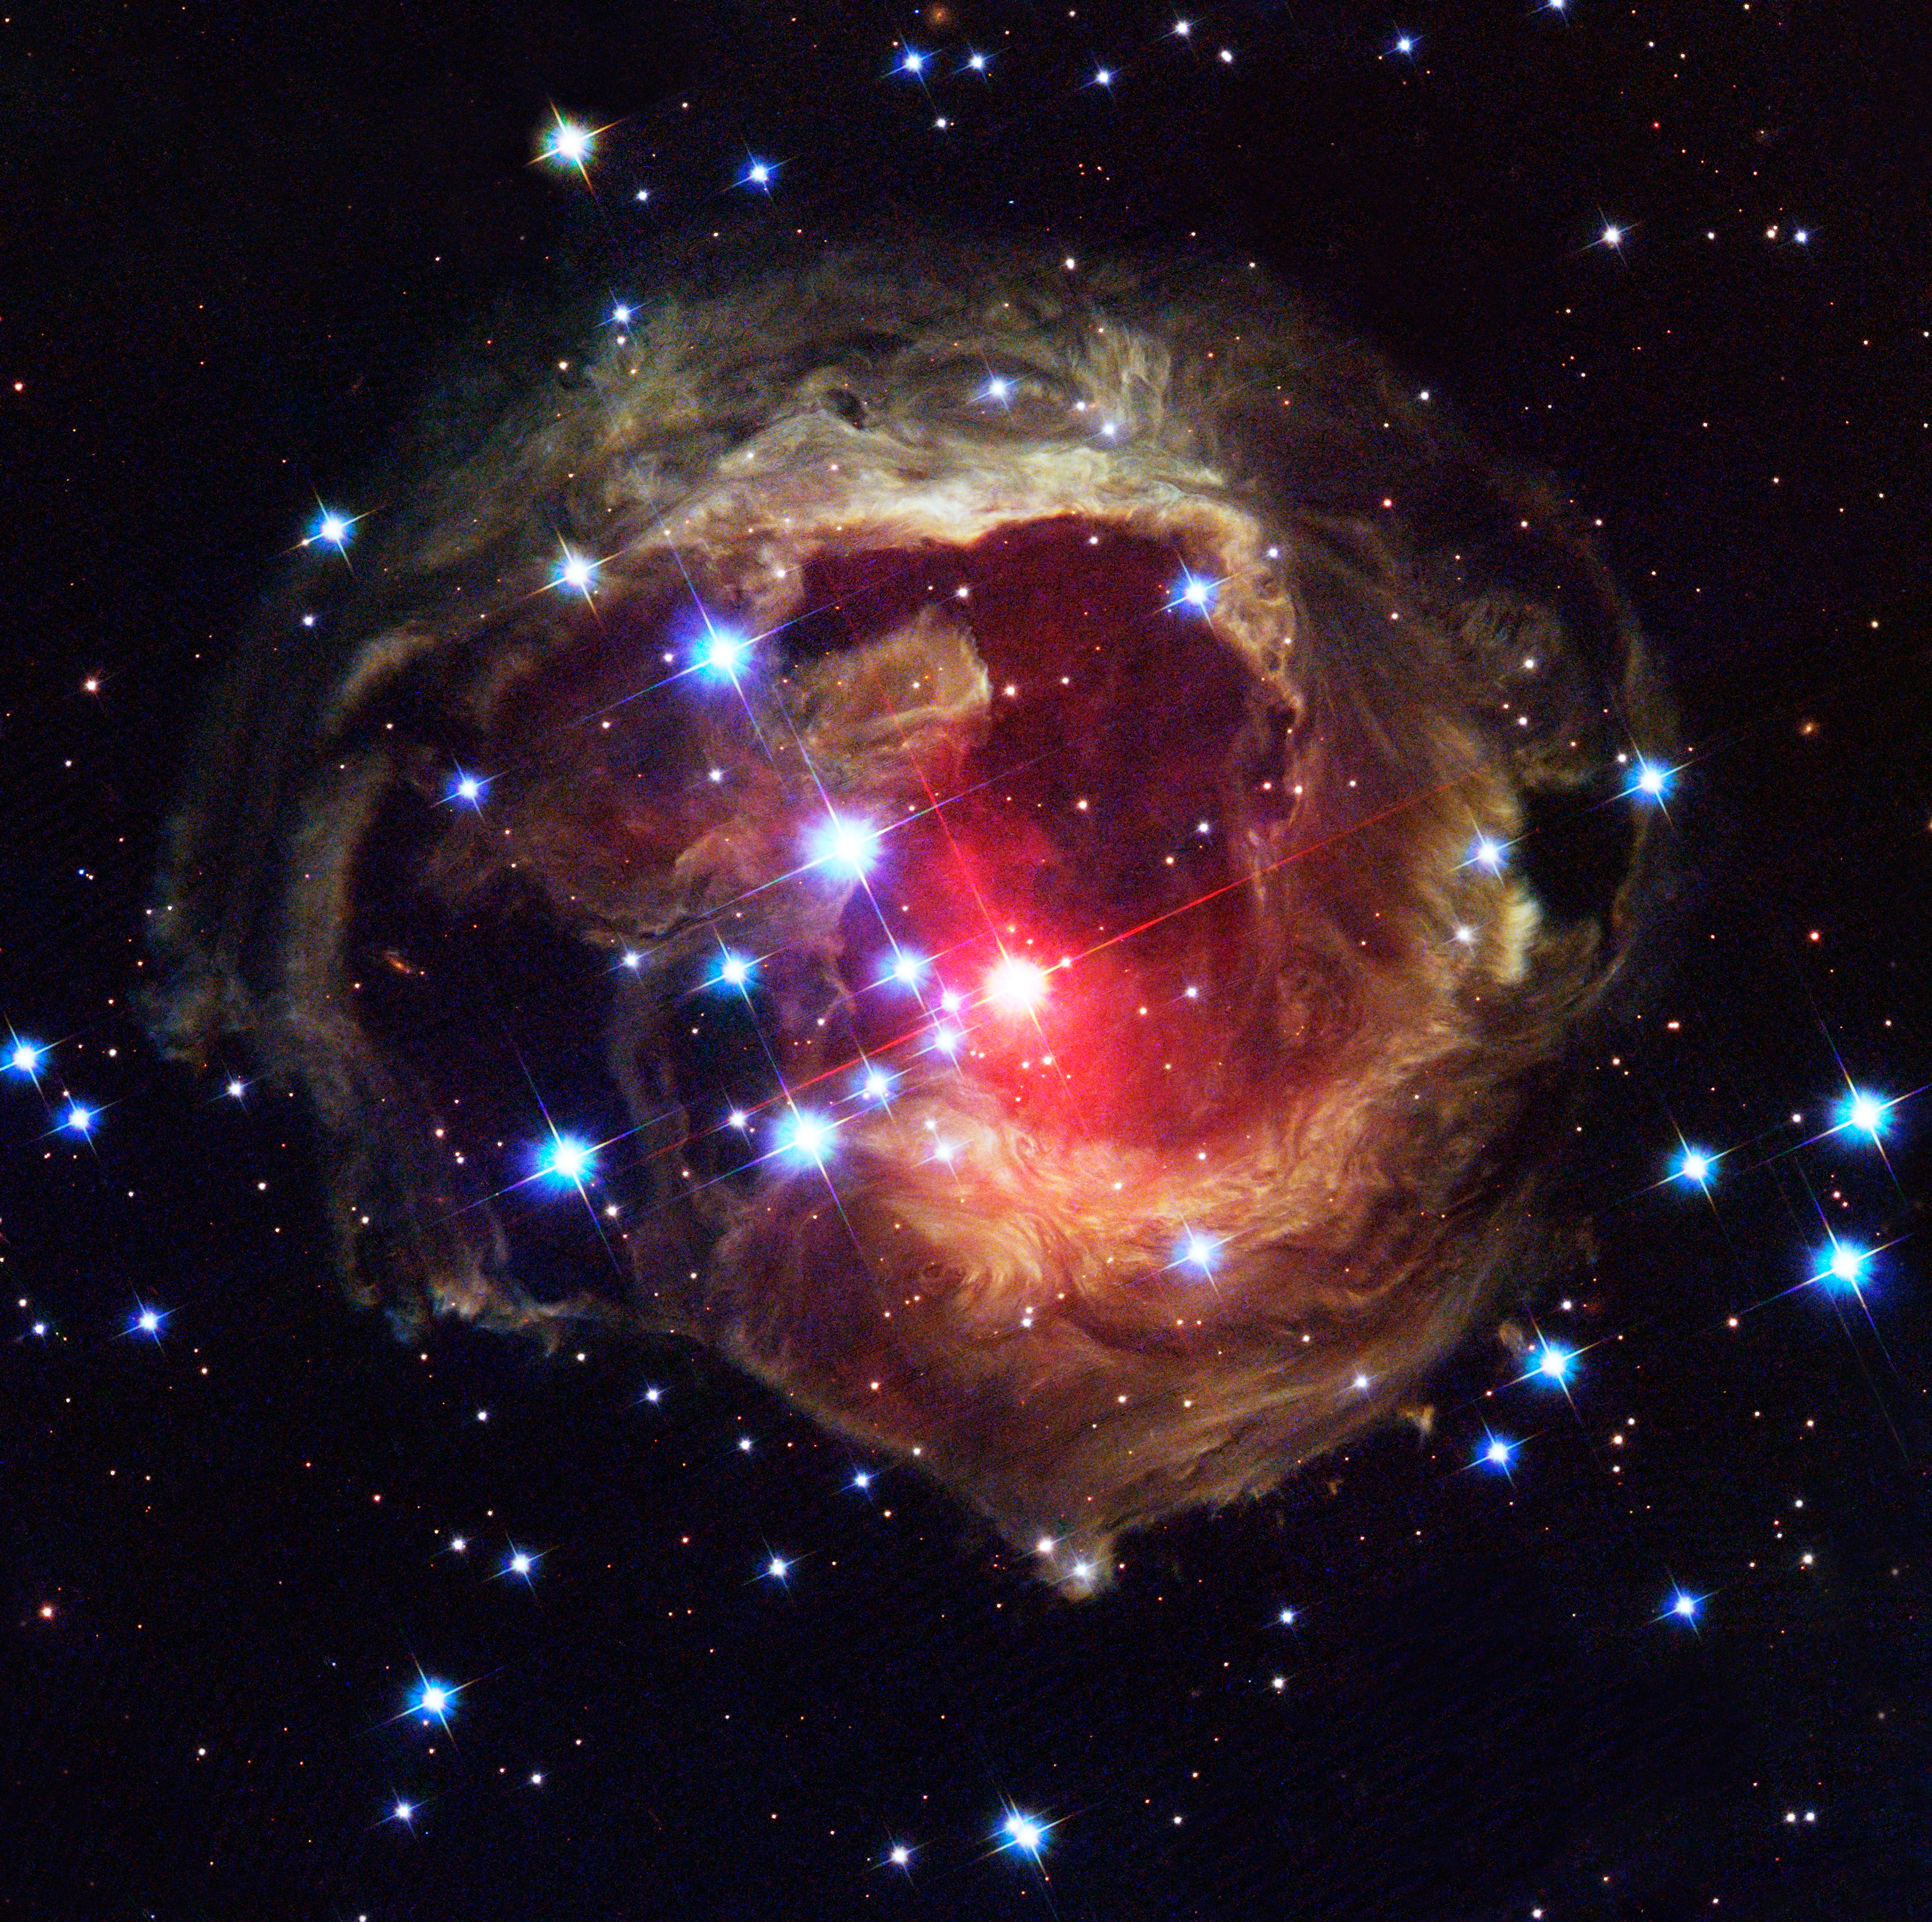

Light continues to echo three years after stellar outburst

The Hubble Space Telescope's latest image of the star V838 Monocerotis (V838 Mon) reveals dramatic changes in the illumination of surrounding dusty cloud structures. The effect, called a light echo, has been unveiling never-before-seen dust patterns ever since the star suddenly brightened for several weeks in early 2002.

Credit: NASA, ESA, and The Hubble Heritage Team (AURA/STScI)